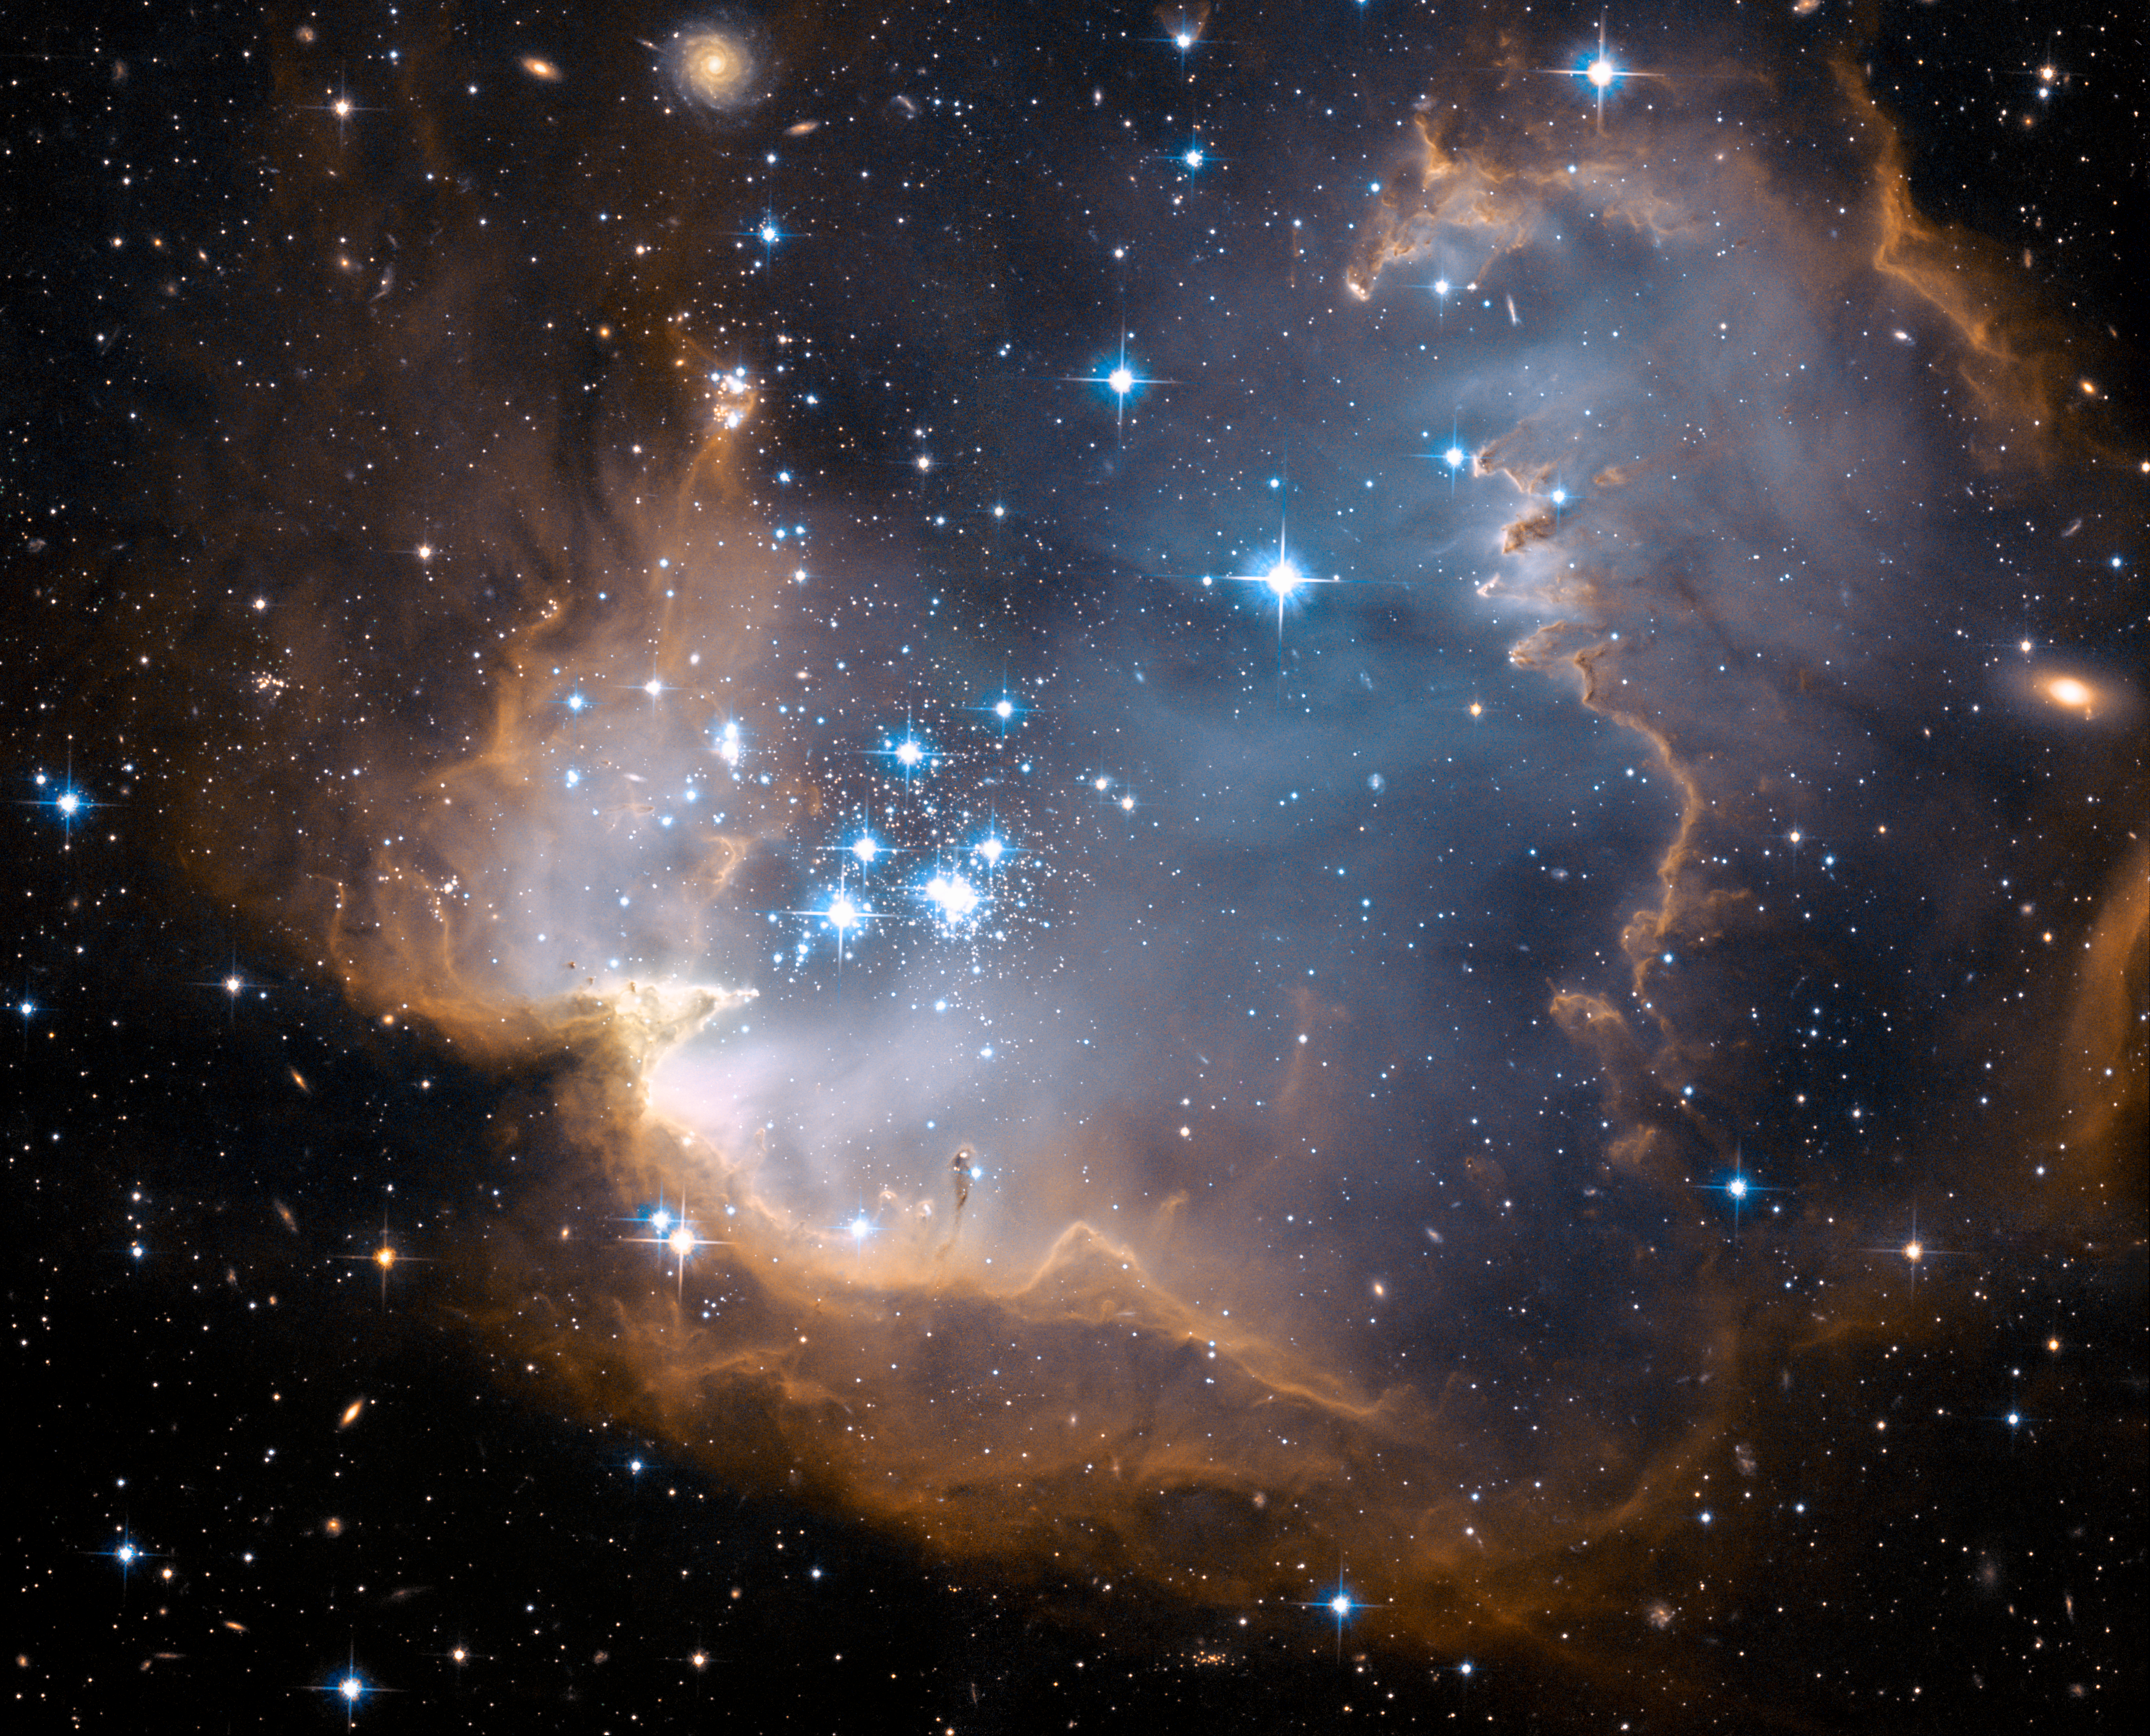

NGC 602 (Hubble image)

This image depicts bright blue newly formed stars that are blowing a cavity in the centre of a fascinating star-forming region known as NGC 602 , also known as N90.

The high energy radiation blazing out from the hot young stars in N90 is eroding the outer portions of the nebula from the inside, as the diffuse outer reaches of the nebula prevent the energetic outflows from streaming away from the cluster directly. Because N90 is located far from the central body of the Small Magellanic Cloud, numerous background galaxies in this picture can be seen, delivering a grand backdrop for the stellar newcomers. The dust in the region gives these distant galaxies a reddish-brown tint.

Credit: NASA, ESA and the Hubble Heritage Team (STScI/AURA)-ESA/Hubble Collaboration